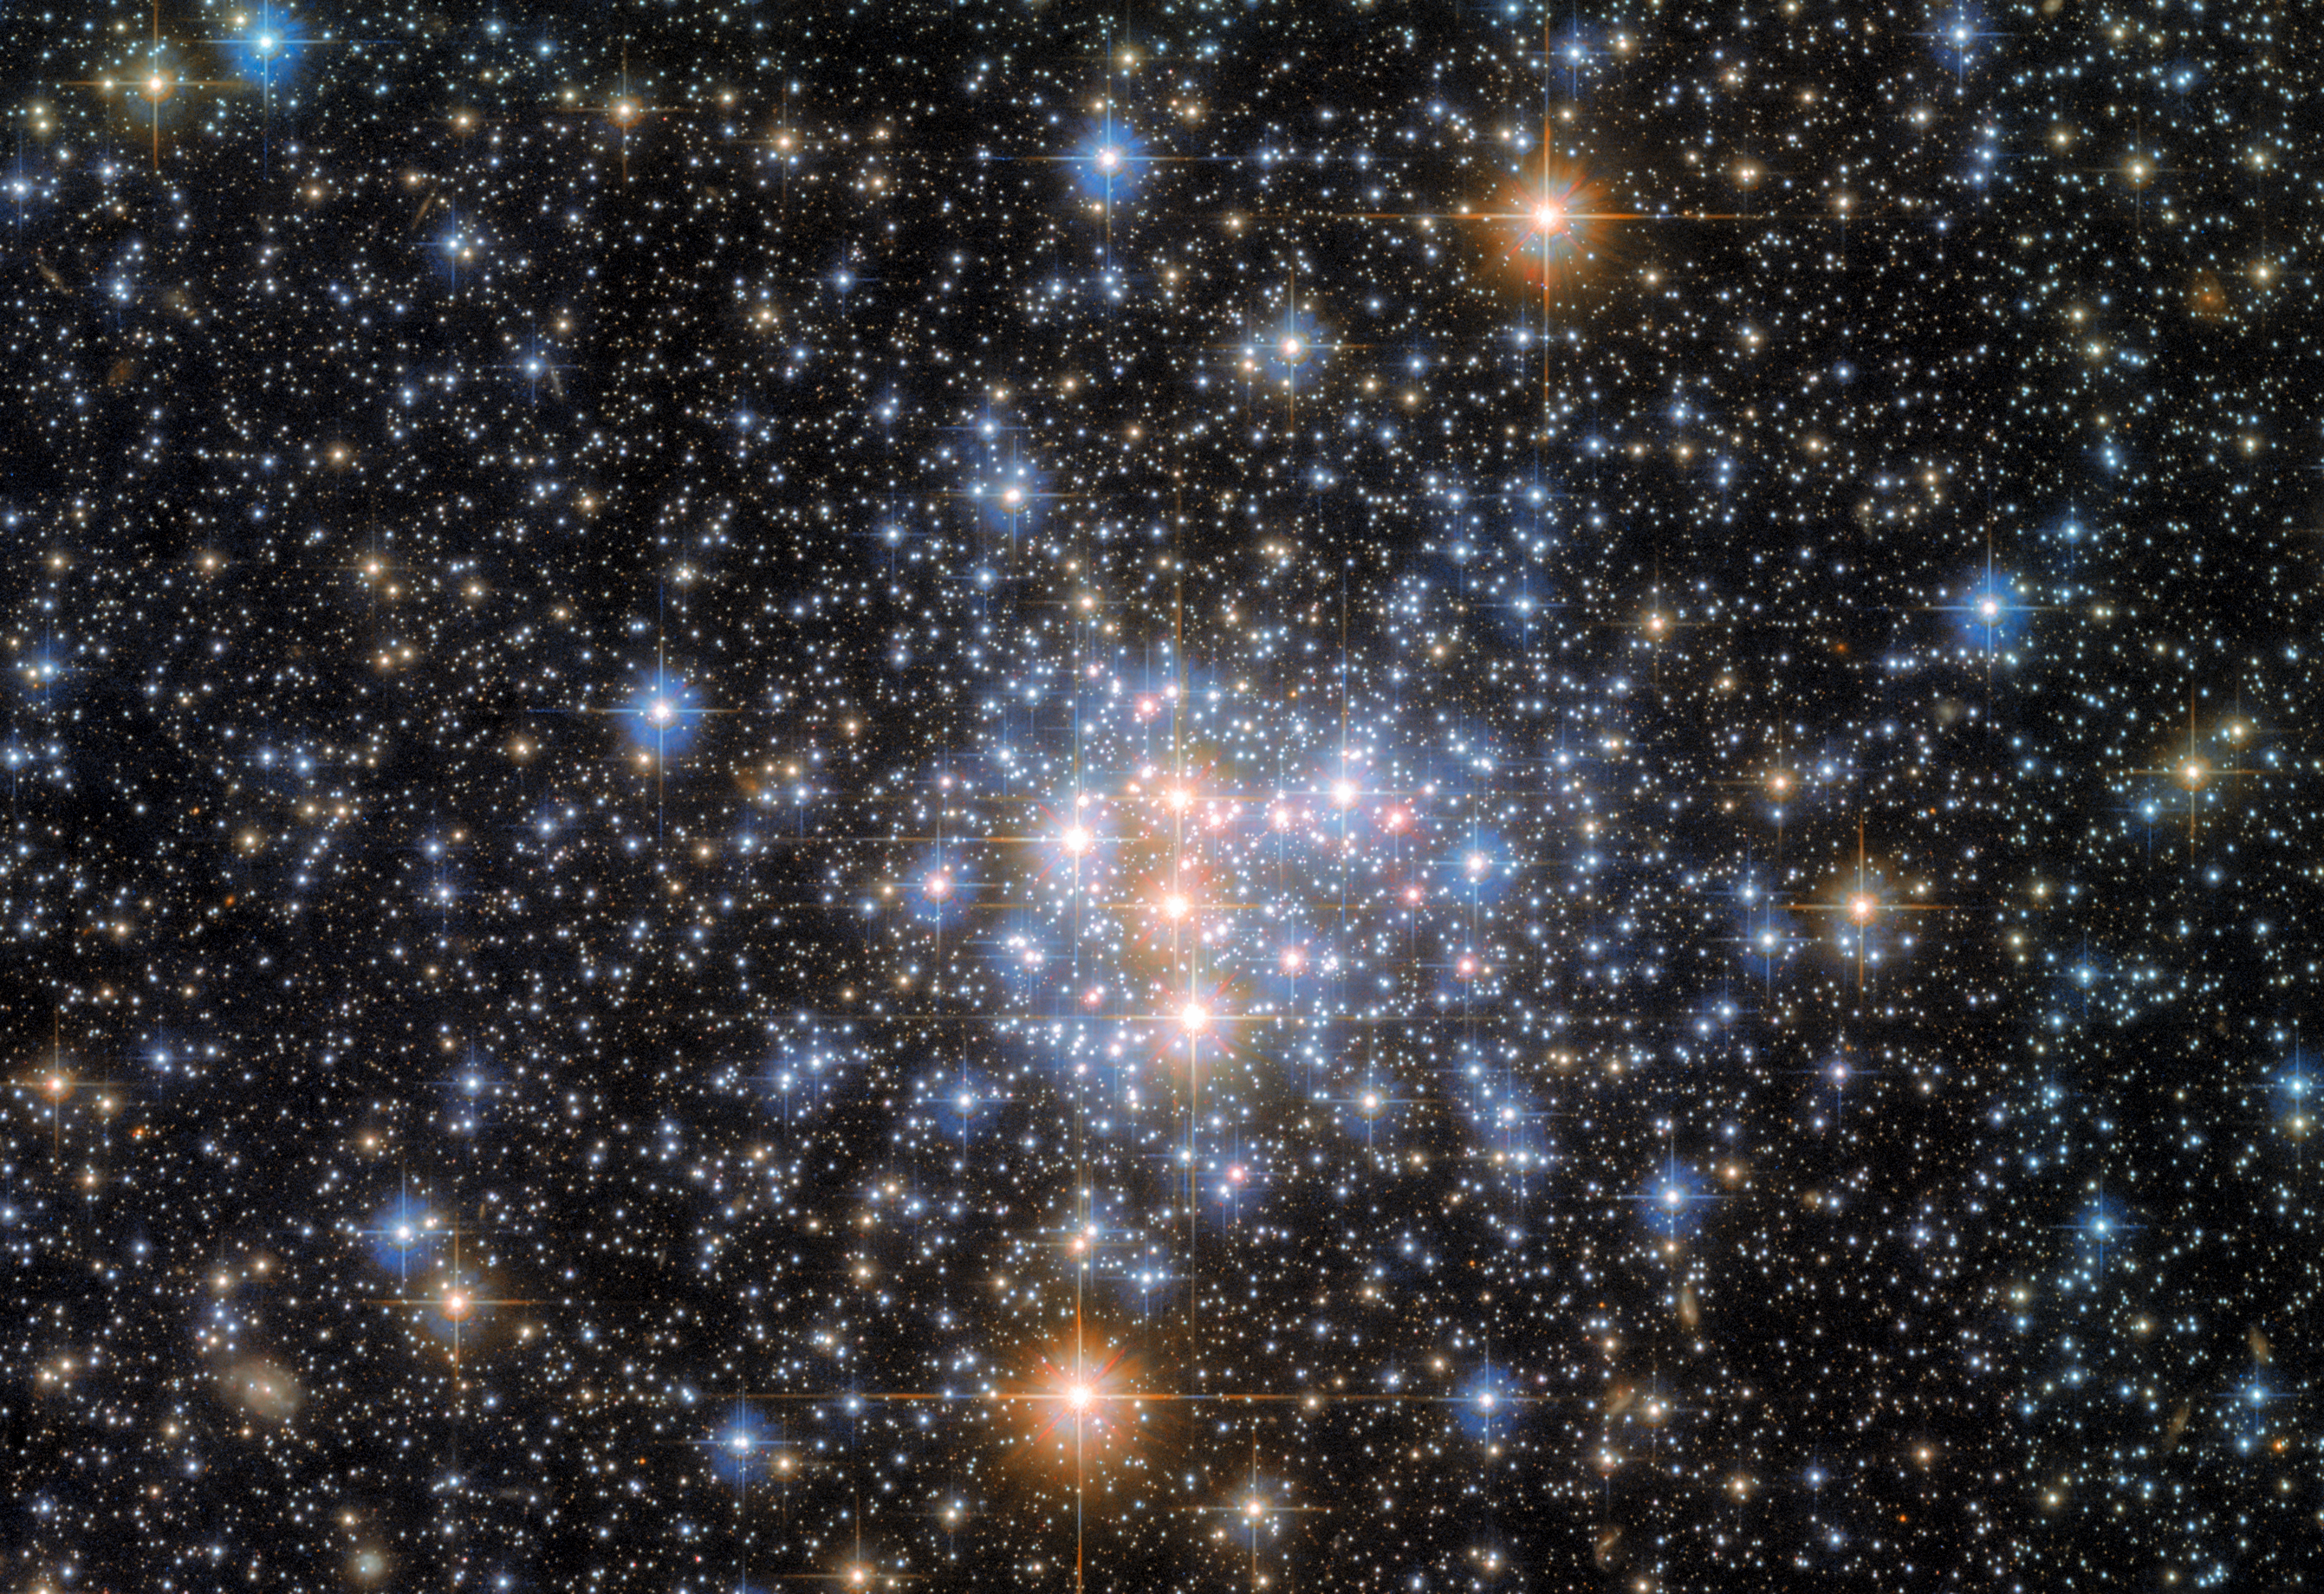

Head in the Clouds

A small portion of the Small Magellanic Cloud (SMC) is pictured in this image from the NASA/ESA Hubble Space Telescope. The SMC is a dwarf galaxy and one of the Milky Way’s nearest neighbours, lying only about 200 000 light-years from Earth. It makes a pair with the Large Magellanic Cloud, and both objects can be seen from the southern hemisphere, as well as from some northern latitudes.

The Small Magellanic Cloud contains hundreds of millions of stars, but this image focuses on just a small fraction of them. These stars comprise the open cluster NGC 376, which has a total mass only about 3400 times that of the Sun. Open clusters, as the name suggests, are loosely bound and sparsely populated. This distinguishes open clusters from globular clusters, which are often so thronged with stars that they have a continuous blur of starlight at their centres. In the case of NGC 376, individual stars can be picked out clearly even in the most densely populated parts of this image.

The data in this image come from two different astronomical investigations which relied on two of Hubble’s instruments: the Wide Field Camera 3 (WFC3) and the Advanced Camera for Surveys (ACS). The first investigation used the ACS to explore a handful of star clusters in the Small Magellanic Cloud and help astronomers explore topics including the abundance of low- and high-mass stars in different environments. The second investigation used both the WFC3 and ACS, and aimed to answer fundamental questions about the lives of stars and help astronomers understand precisely where, when, why and how stars form.

Credit: ESA/Hubble & NASA, A. Nota, G. De Marchi